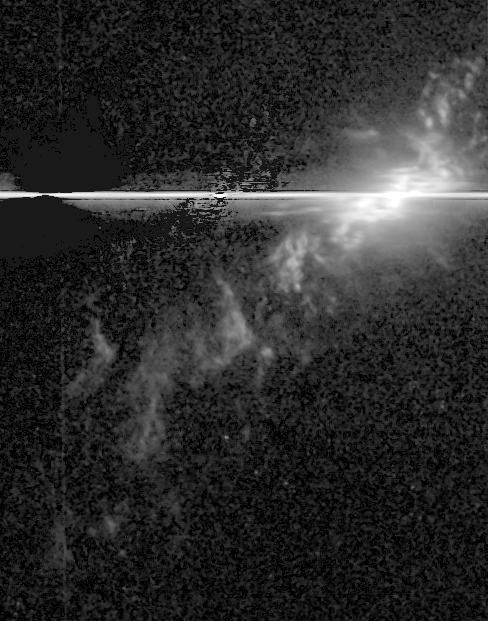

Fireworks near galaxy NGC 4151 (STIS optical)

In this STIS spectral image of the oxygen gas, the velocities of the knots are determined by comparing the knots of gas in the stationary WFPC2 image to the horizontal location of the knots in the STIS image.

Credit: John Hutchings (Dominion Astrophysical Observatory), Bruce Woodgate (GSFC/NASA/ESA), Mary Beth Kaiser (Johns Hopkins University), Steven Kraemer(Catholic University of America), and the STIS Team